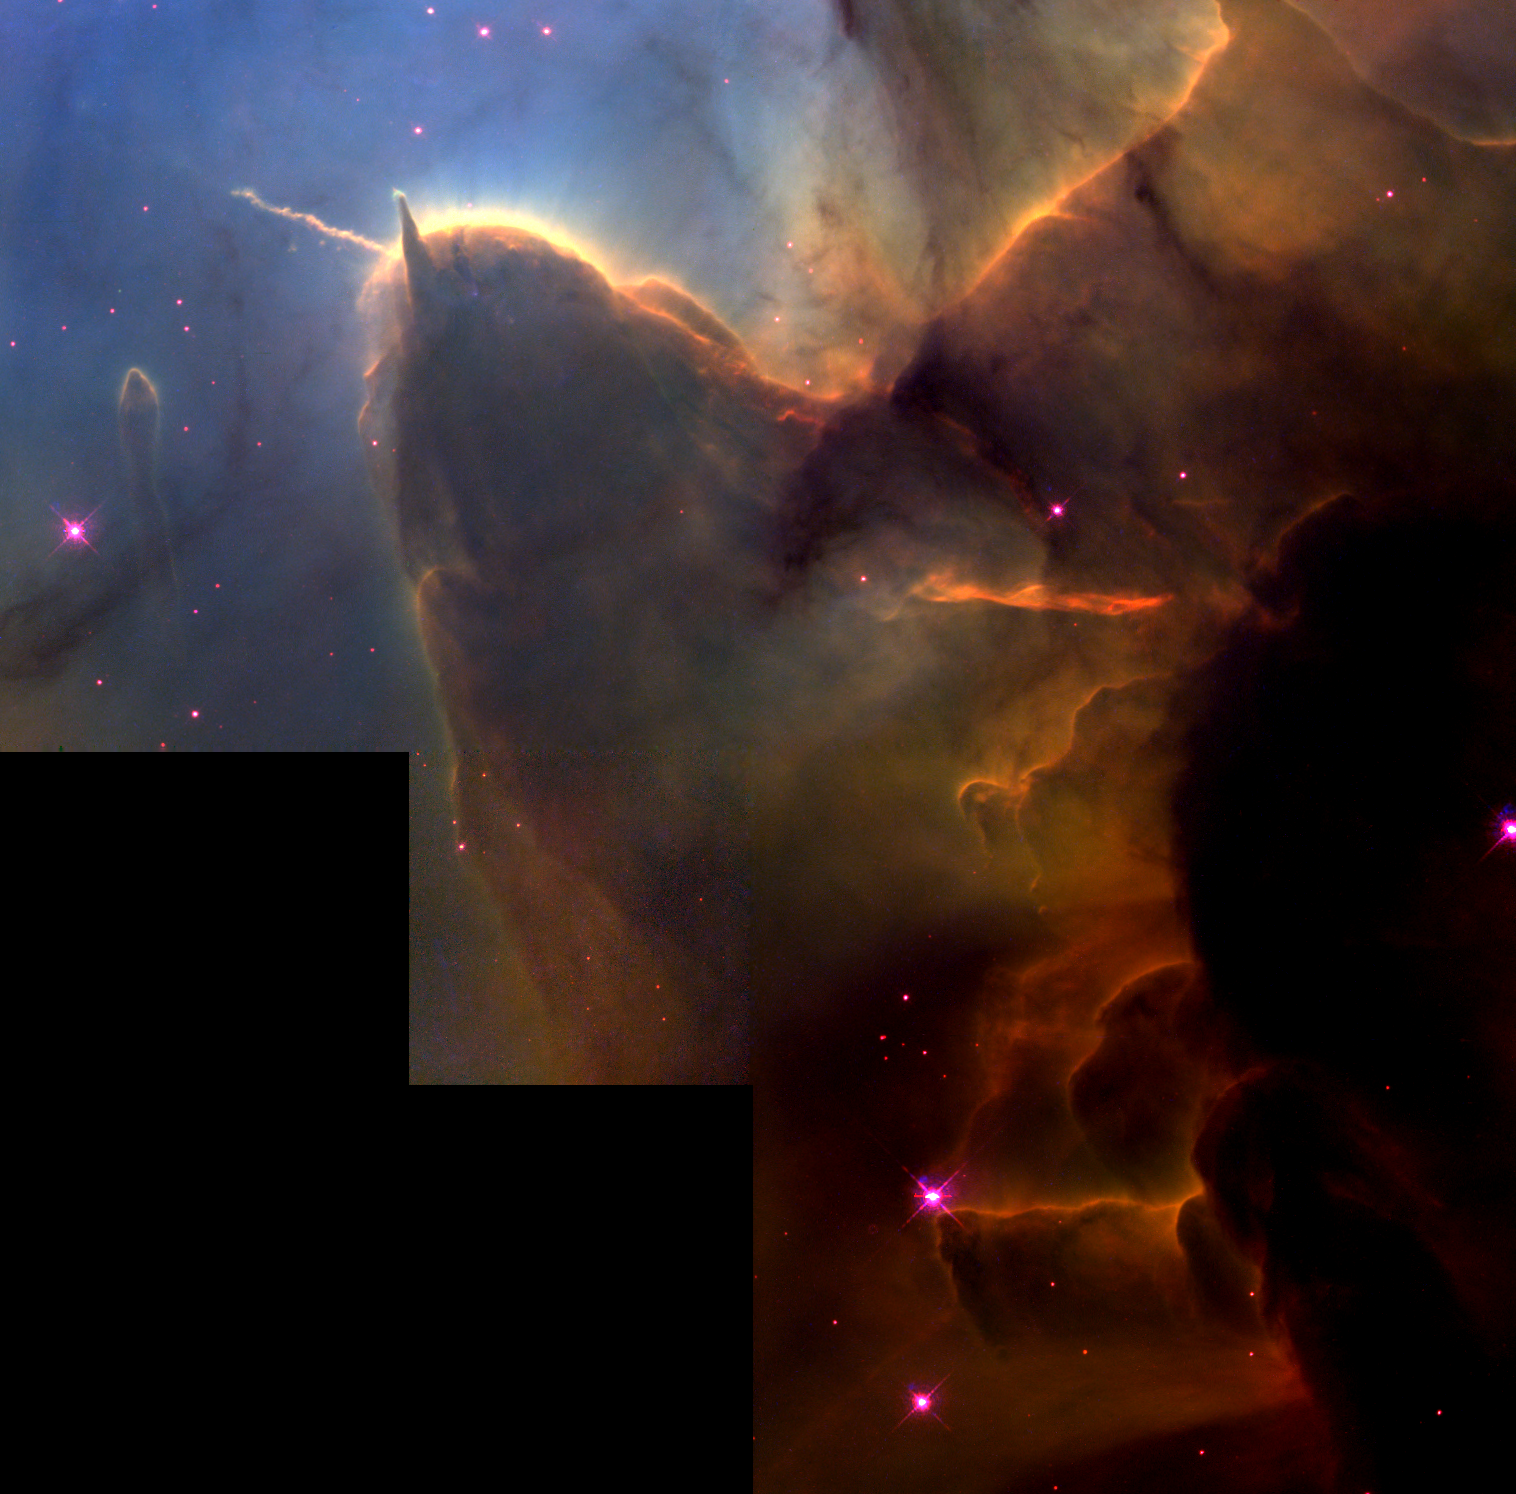

The Trifid Nebula: stellar sibling rivalry

This NASA/ESA Hubble Space Telescope image of the Trifid Nebula reveals a stellar nursery being torn apart by radiation from a nearby, massive star.

The picture also provides a peek at embryonic stars forming within an ill-fated cloud of dust and gas, which is destined to be eaten away by the glare from the massive neighbor.

This stellar activity is a beautiful example of how the life cycles of stars like our Sun is intimately connected with their more powerful siblings.

Credit: NASA/ESA and Jeff Hester (Arizona State University)